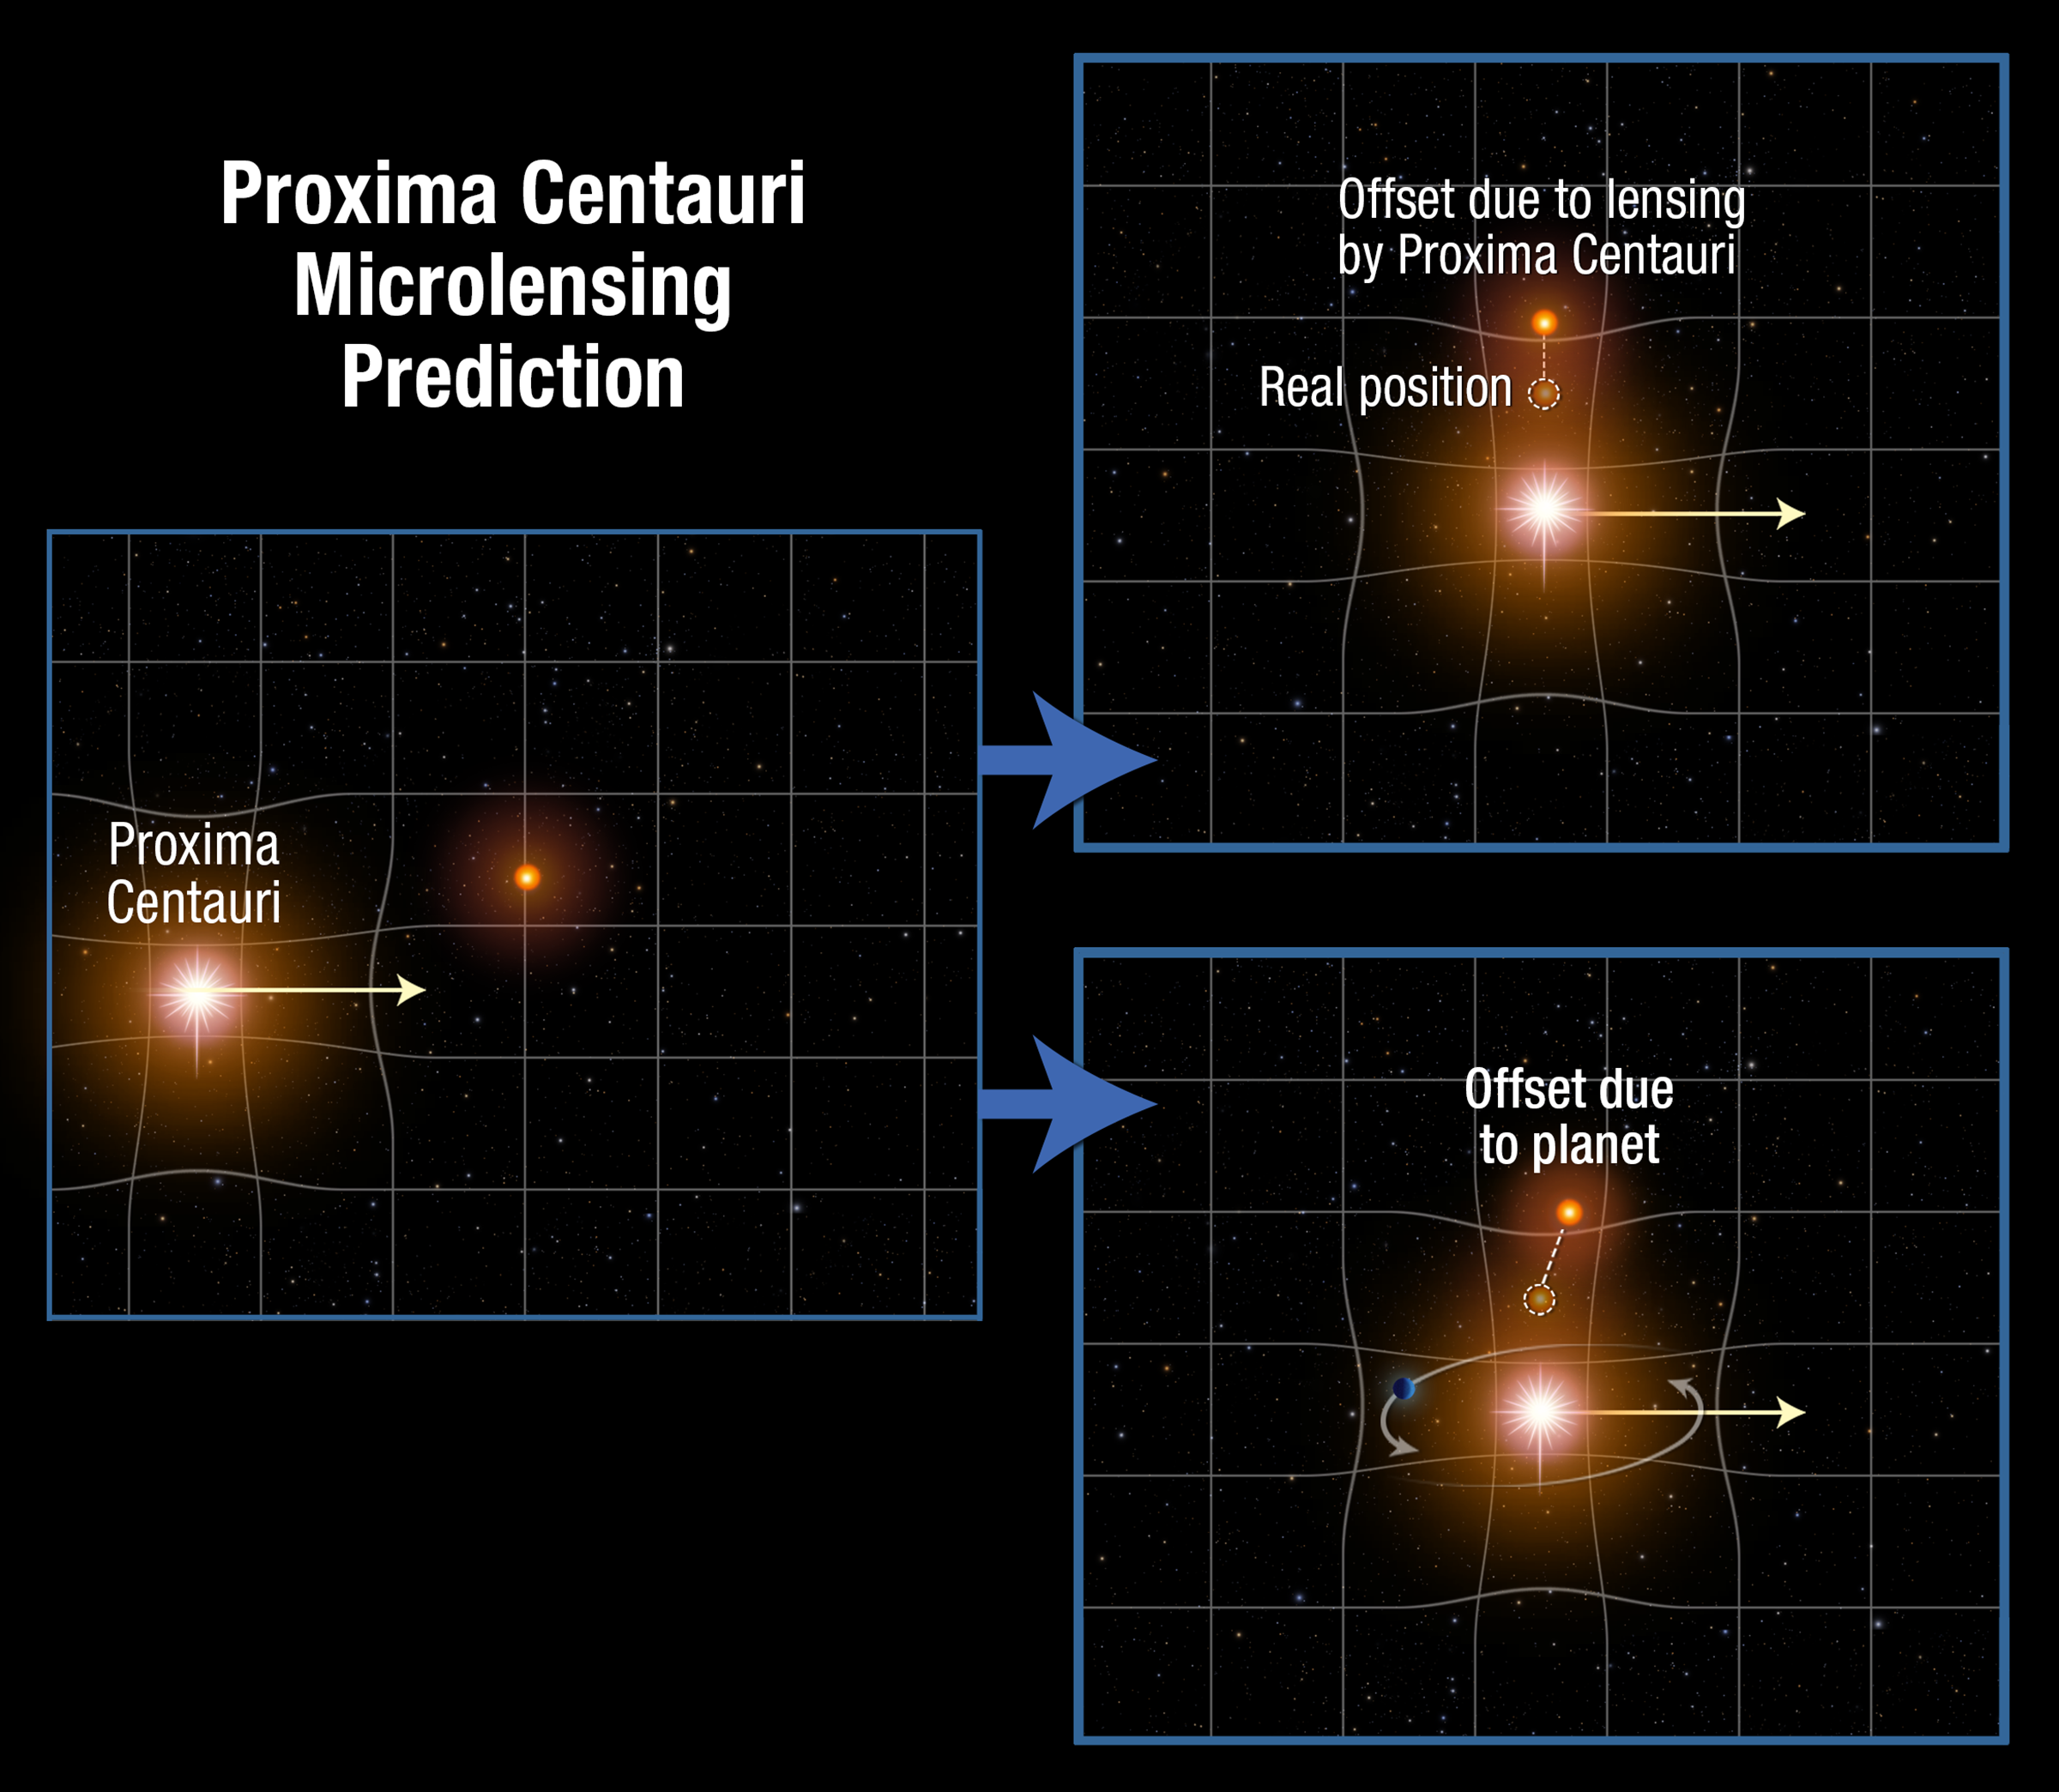

Proxima Centauri microlensing prediction

This diagram shows the upcoming conjunction between the nearest star to our Sun, Proxima Centauri, and a distant background star. Proxima's gravitational field warps the space around it. This gravitational lensing effect distorts space like a funhouse mirror and bends the path of light from the background star. The result is that the apparent position of the star will shift slightly during Proxima Centauri's passage, as seen in the upper right diagram. If an unseen planet is orbiting Proxima Centauri the star's apparent position will be further offset, as seen in the bottom right frame.

Credit: A. Feild (STScI)